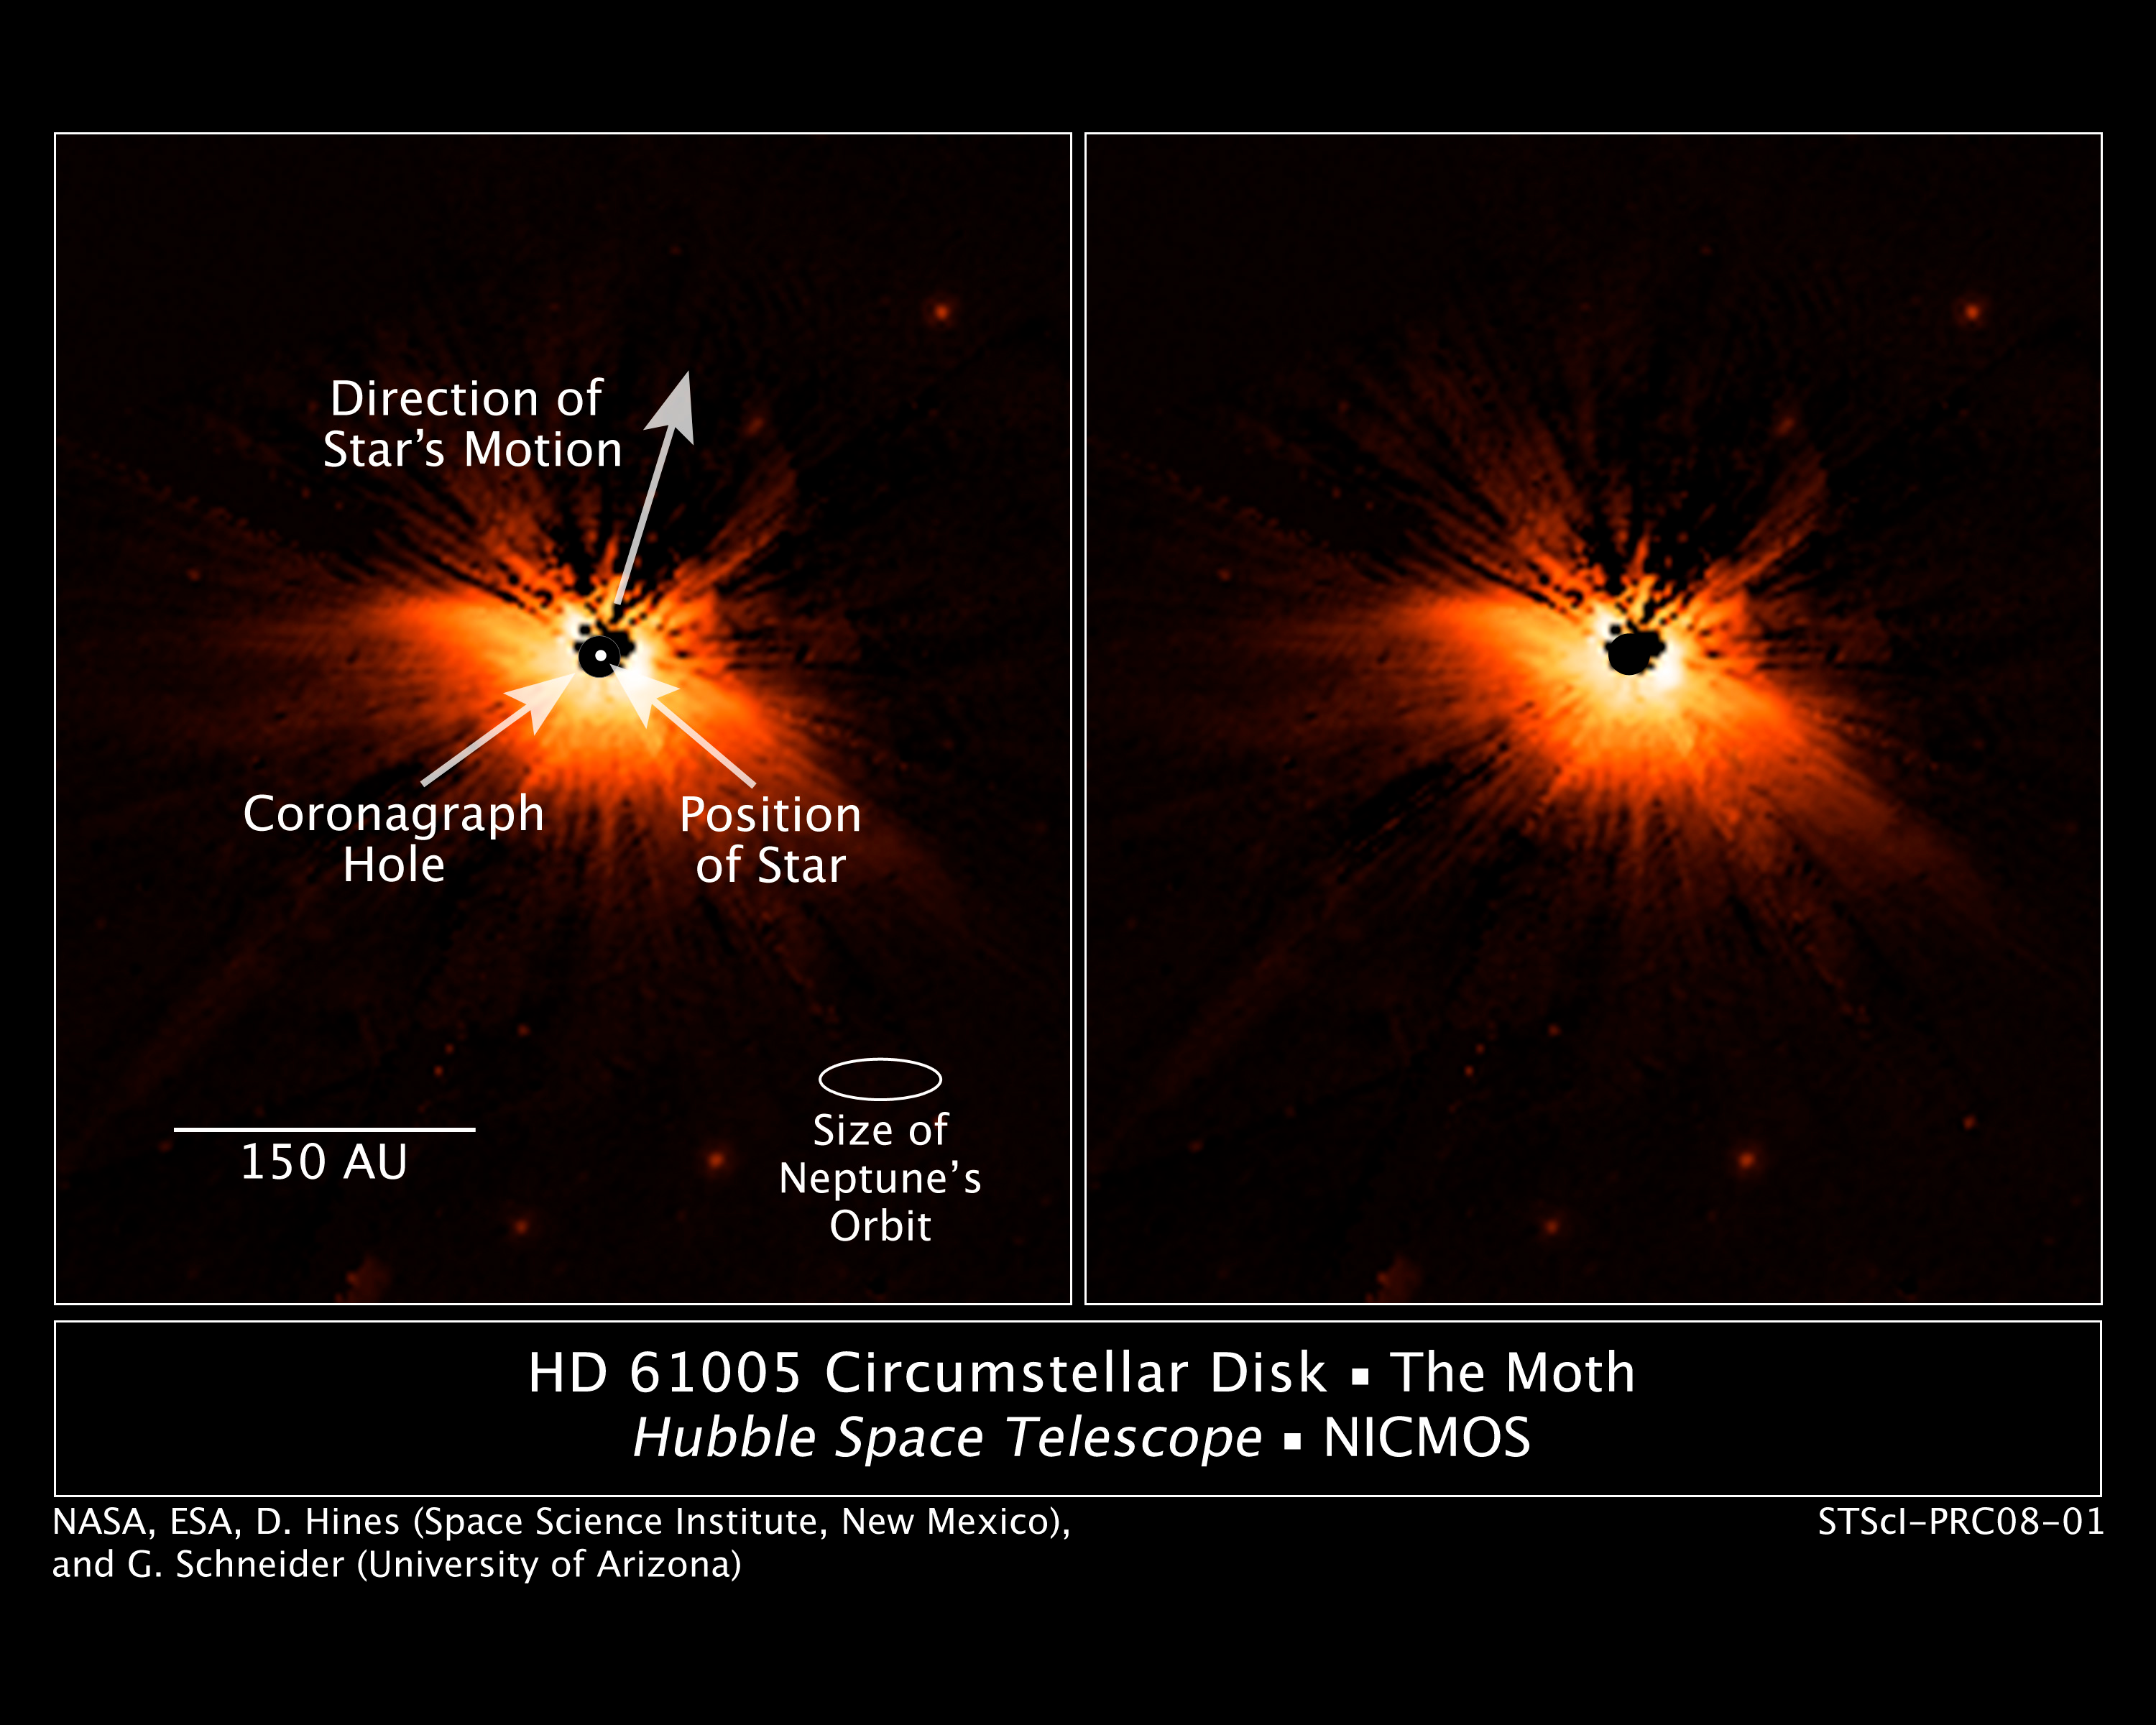

Hubble Catches a Dusty Moth

These near-infrared images, taken with the Near-Infrared Camera and Multi-Object Spectrometer (NICMOS) aboard NASA's Hubble Space Telescope, show the wing- shaped dust disk surrounding the young, nearby star HD 61005. Astronomers have dubbed the star system "The Moth" because the dust disk resembles the wings of the flying insect.

Credit: NASA, D. Hines (Space Science Institute, New Mexico Office in Corrales, New Mexico), and G. Schneider (University of Arizona)